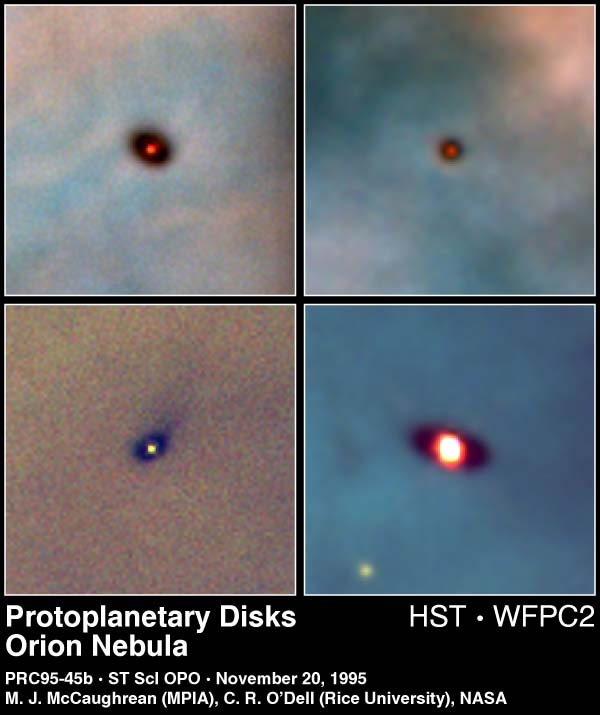

Protoplanetary Discs in the Orion Nebula

These are Hubble Space Telescope images of four newly discovered protoplanetary disks around young stars in the Orion nebula, located 1, 500 light-years away. Gas and dust disks, long suspected by astronomers to be an early stage of planetary formation, can be directly seen in visible light by Hubble.

Credit: Mark McCaughrean (Max-Planck-Institute for Astronomy), C. Robert O'Dell (Rice University), and NASA/ESA